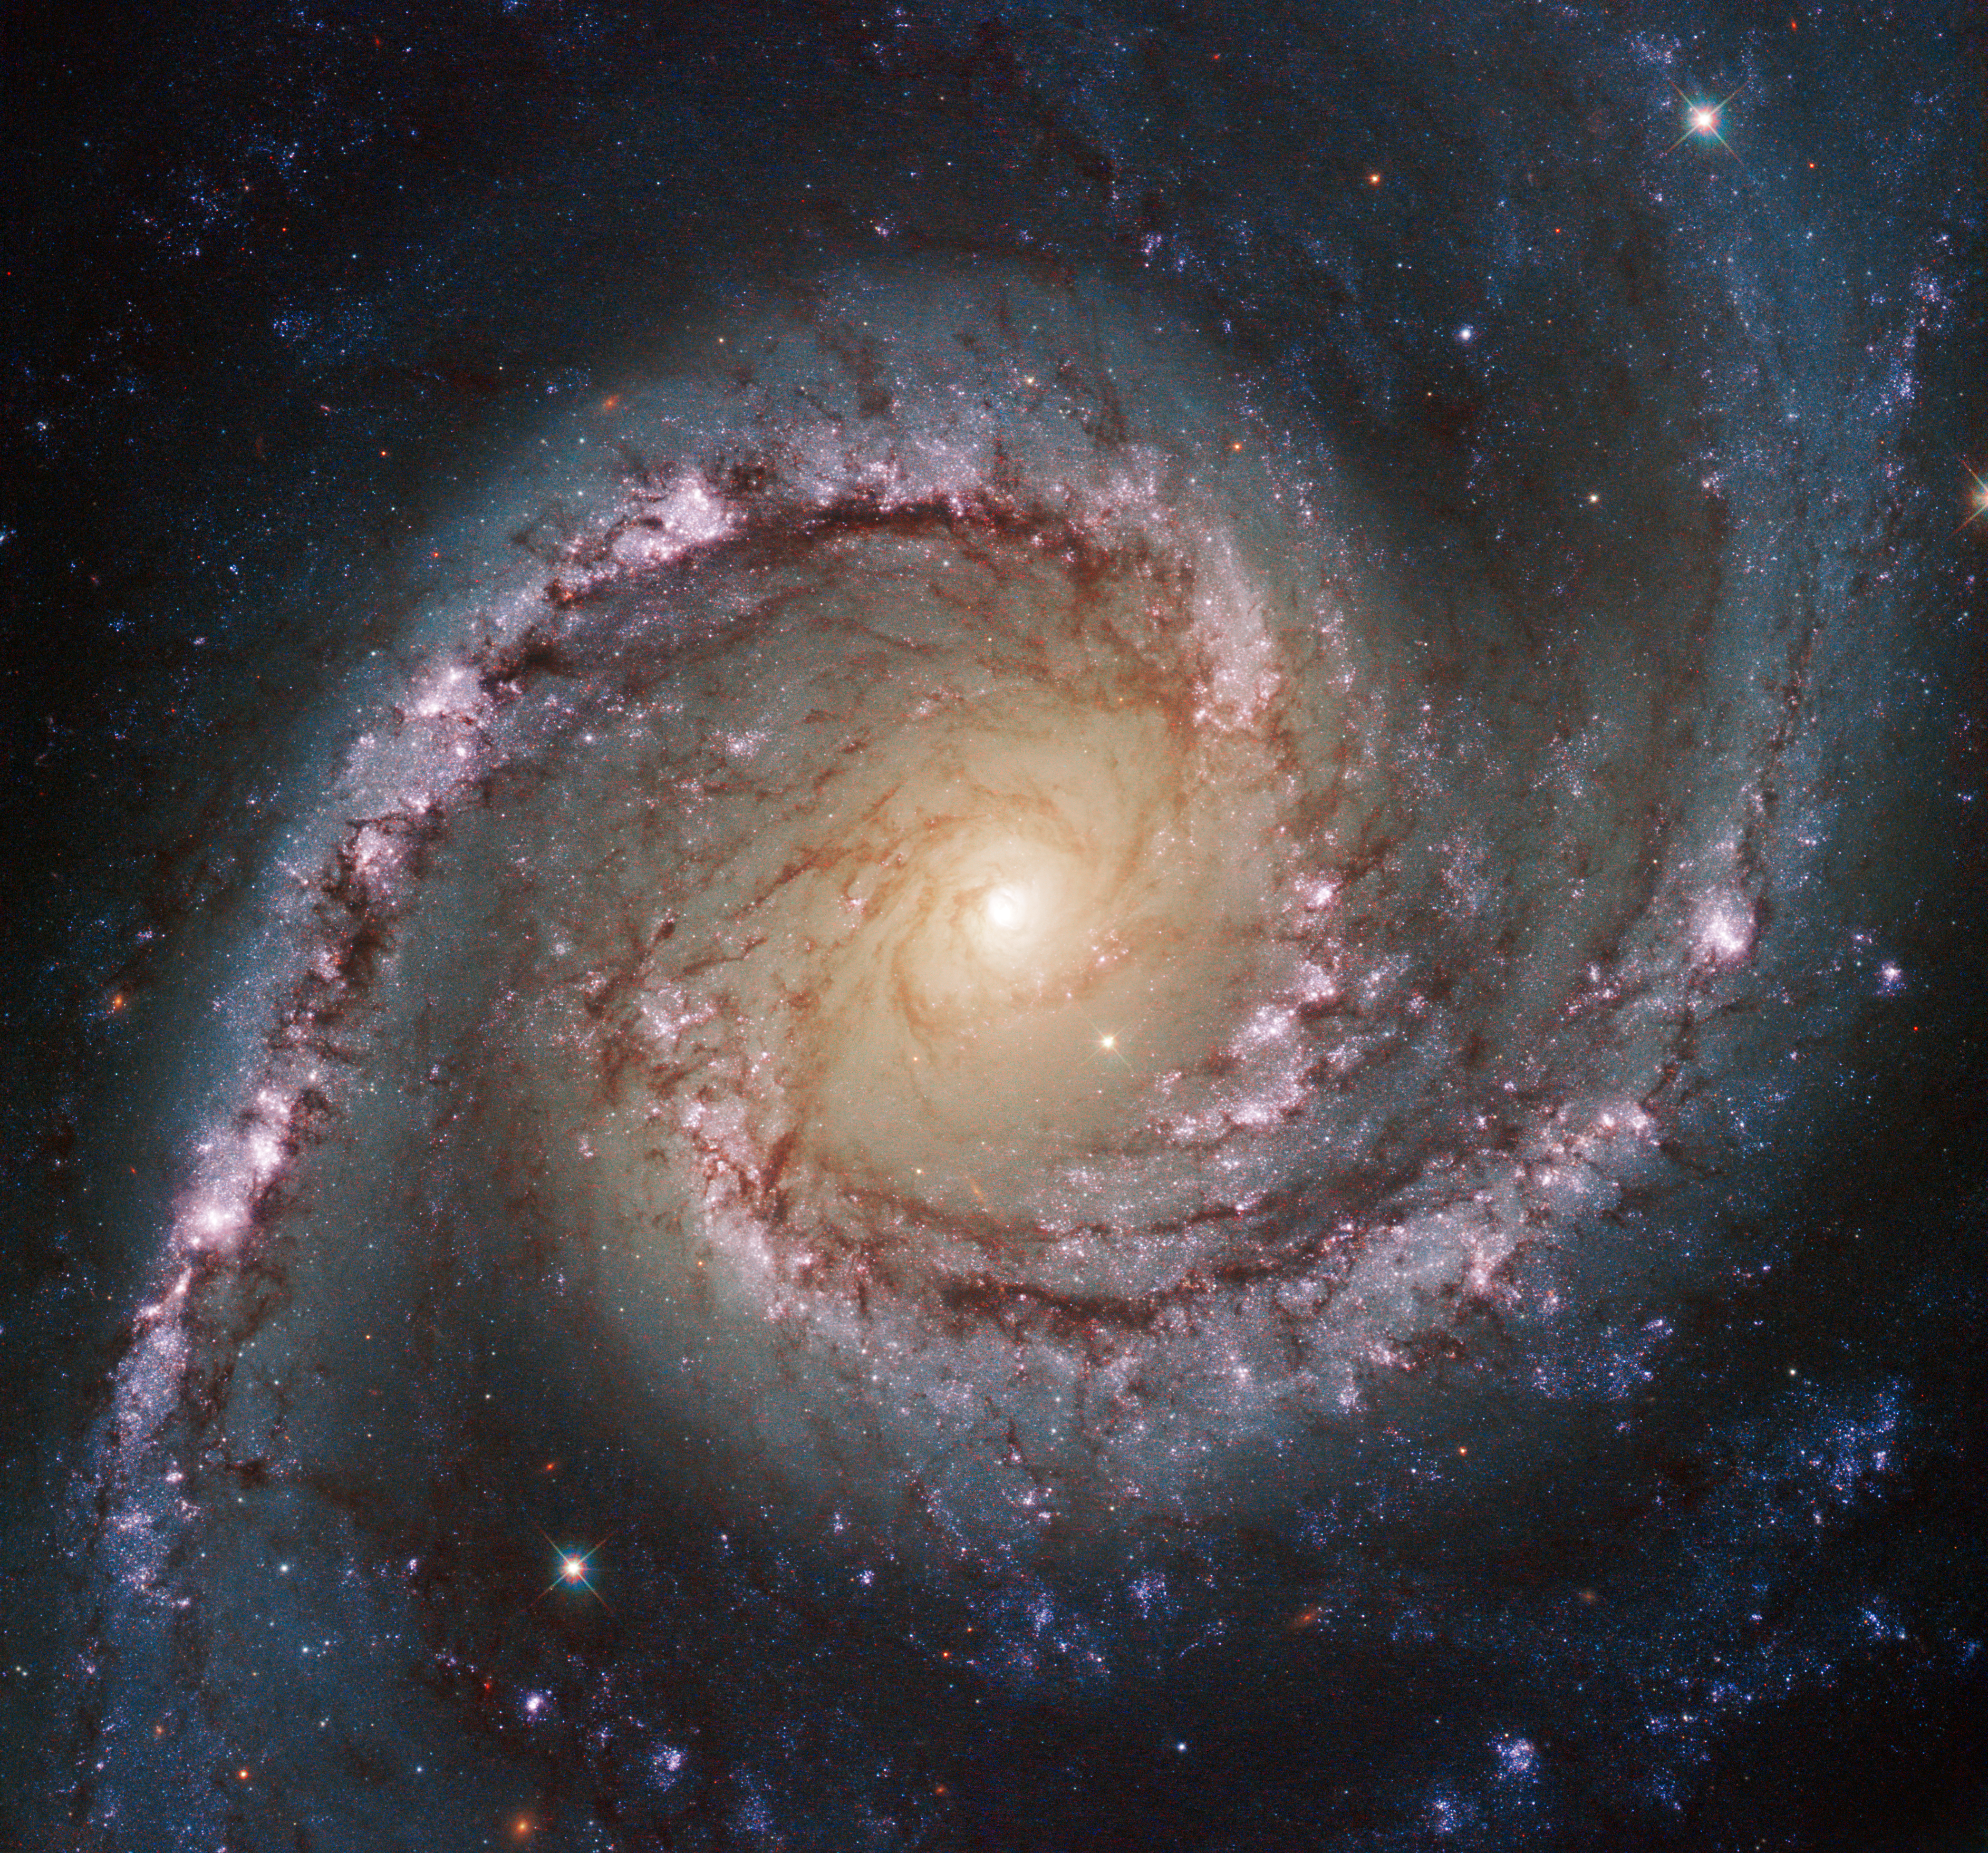

Grand swirls

This new Hubble image shows NGC 1566, a beautiful galaxy located approximately 40 million light-years away in the constellation of Dorado (The Dolphinfish). NGC 1566 is an intermediate spiral galaxy, meaning that while it does not have a well defined bar-shaped region of stars at its centre — like barred spirals — it is not quite an unbarred spiral either (heic9902o).

The small but extremely bright nucleus of NGC 1566 is clearly visible in this image, a telltale sign of its membership of the Seyfert class of galaxies. The centres of such galaxies are very active and luminous, emitting strong bursts of radiation and potentially harbouring supermassive black holes that are many millions of times the mass of the Sun.

NGC 1566 is not just any Seyfert galaxy; it is the second brightest Seyfert galaxy known. It is also the brightest and most dominant member of the Dorado Group, a loose concentration of galaxies that together comprise one of the richest galaxy groups of the southern hemisphere. This image highlights the beauty and awe-inspiring nature of this unique galaxy group, with NGC 1566 glittering and glowing, its bright nucleus framed by swirling and symmetrical lavender arms.

This image was taken by Hubble’s Wide Field Camera 3 (WFC3) in the near-infrared part of the spectrum. A version of the image was entered into the Hubble’s Hidden Treasures image processing competition by Flickr user Det58.

Credit: ESA/Hubble & NASA
Acknowledgement: Flickr user Det58